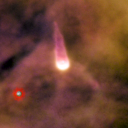

170-249

One of 42 new proplyds discovered in the Orion Nebula, 170-249 is one of the bright proplyds that lies relatively close to the nebula’s brightest star, Theta 1 Orionis C. The tadpole-shaped tail is actually a jet of matter flowing away from the excited cusp.

Credit: NASA/ESA and L. Ricci (ESO)